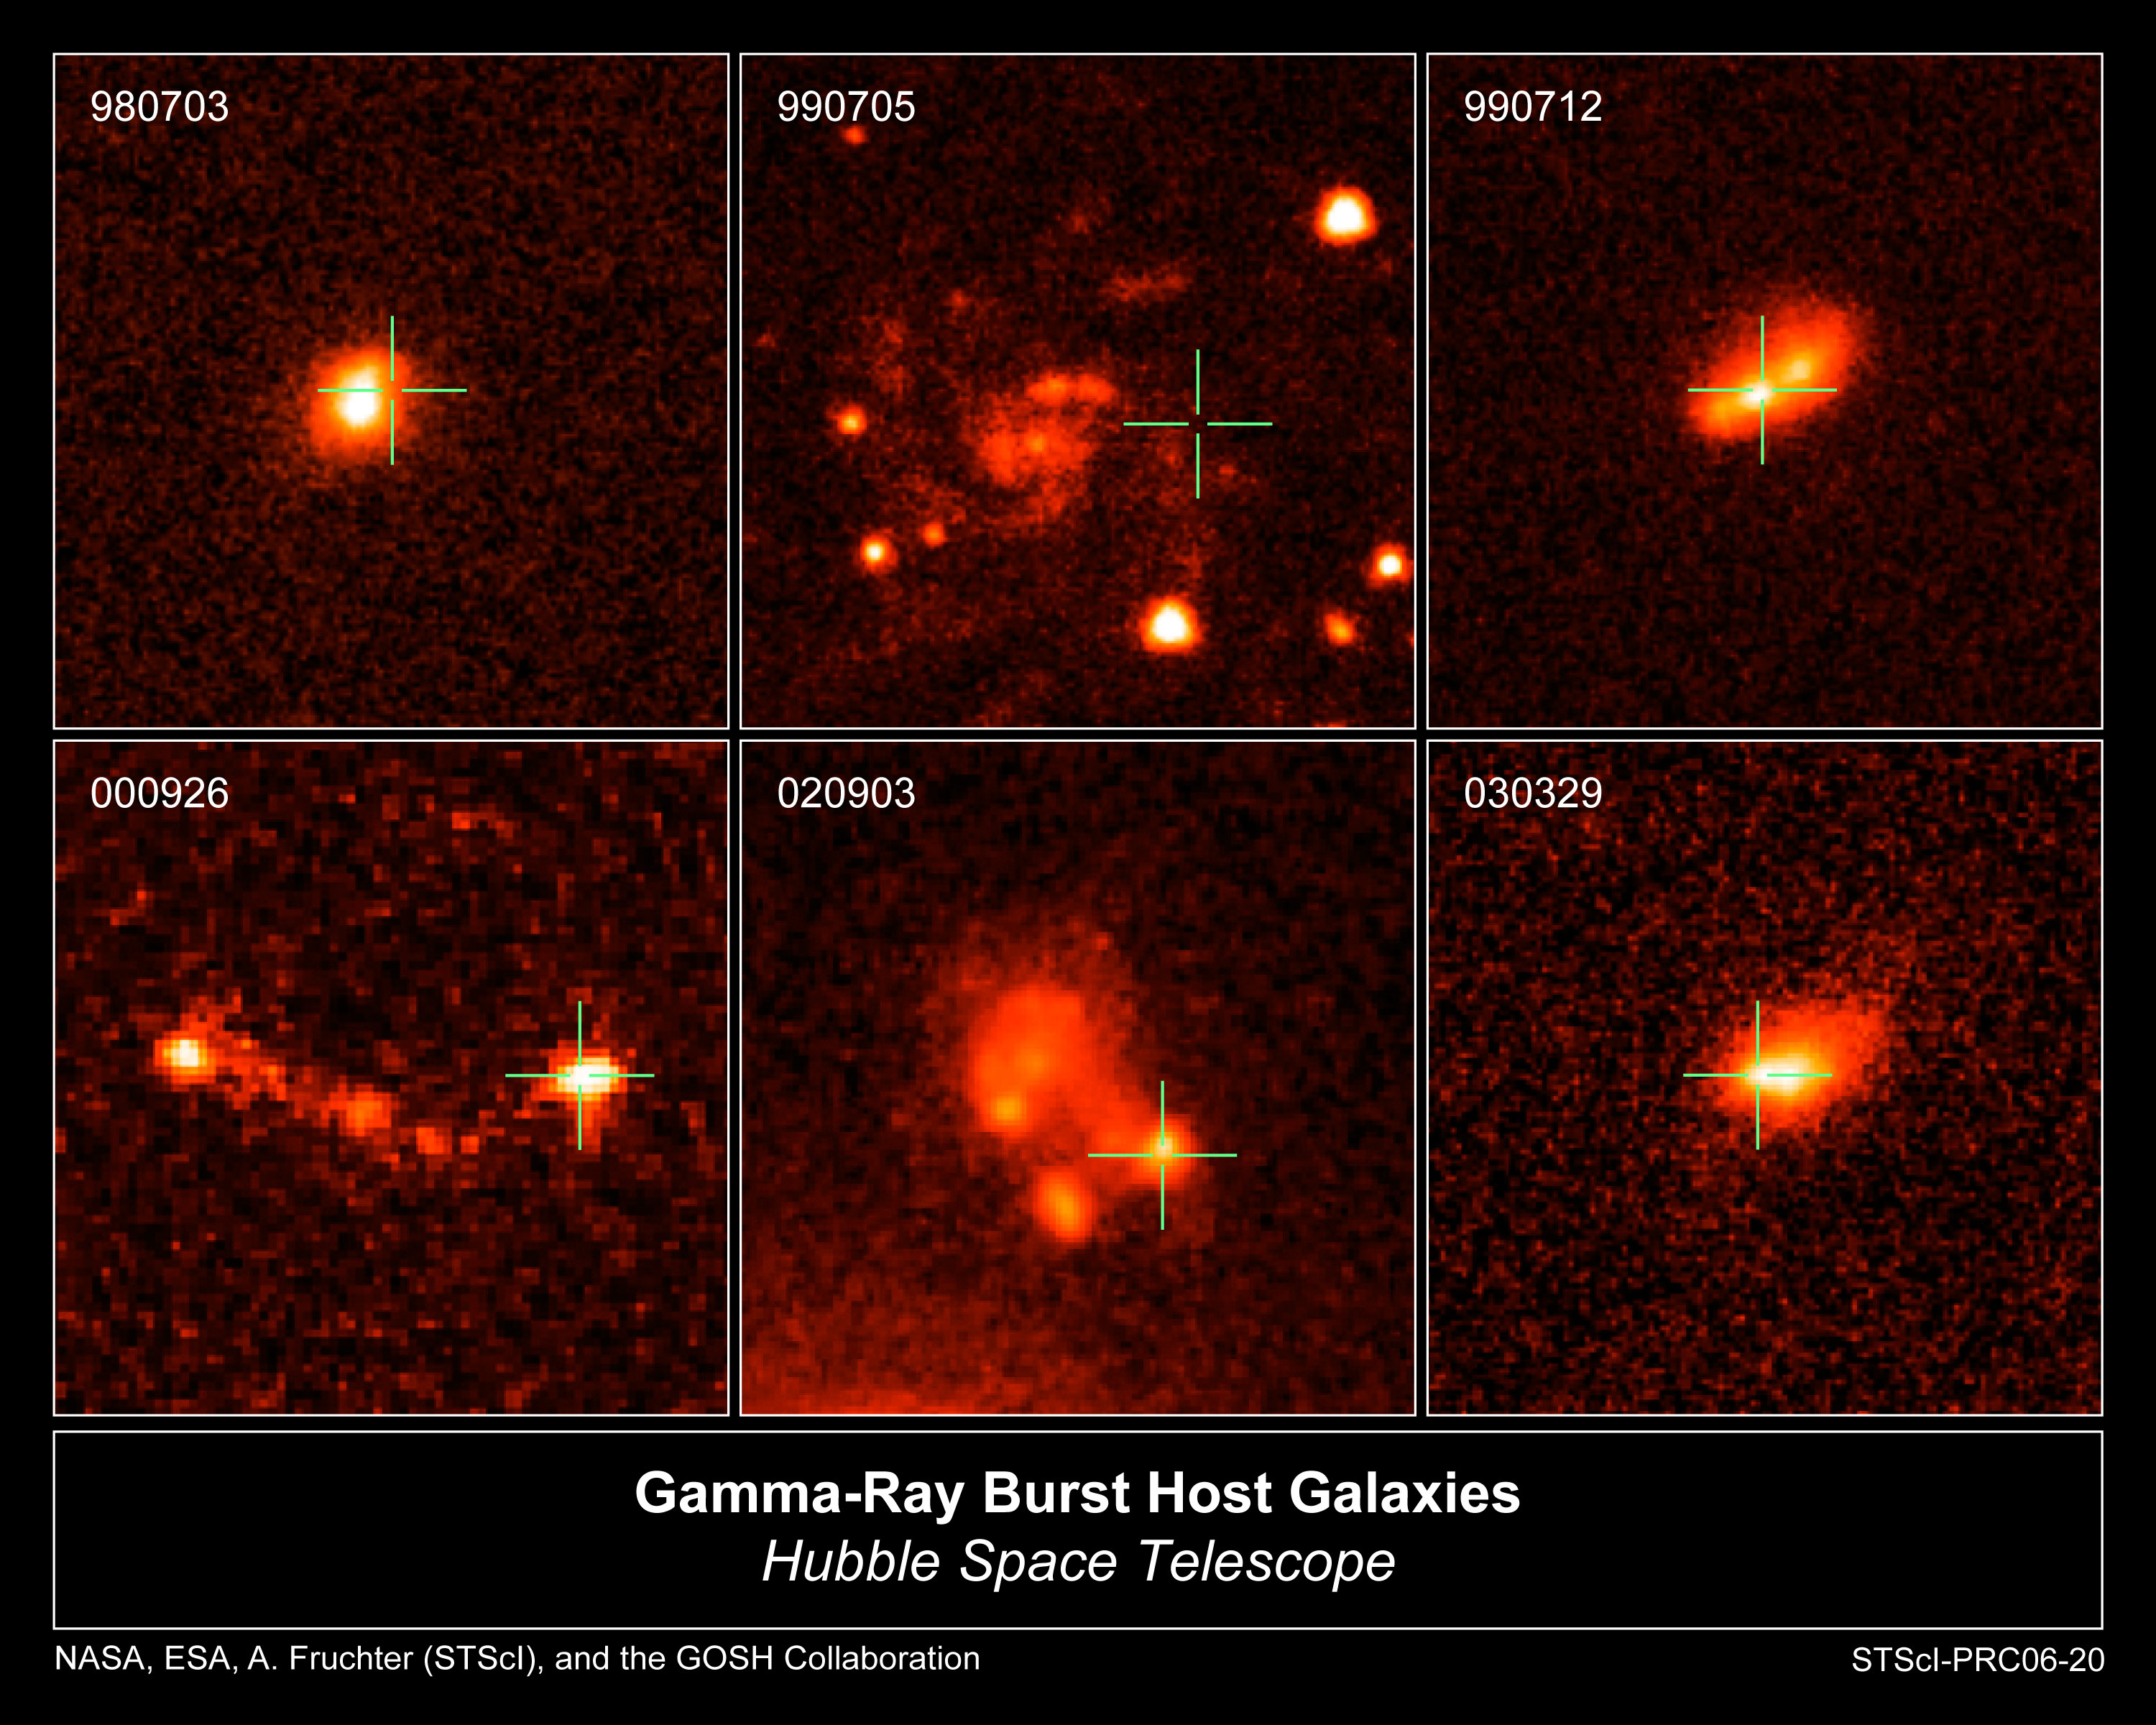

The Host Galaxies of Gamma-ray Bursts

This is a sampling of the host galaxies of long-duration gamma-ray bursts taken by NASA/ESA Hubble Space Telescope. Gamma-ray bursts are powerful flashes of high-energy radiation that arise from some supernovae, the explosive deaths of extremely massive stars. Long-duration bursts last more than one to two seconds.

Credit: NASA, ESA, Andrew Fruchter (STScI), and the GRB Optical Studies with HST (GOSH) collaboration